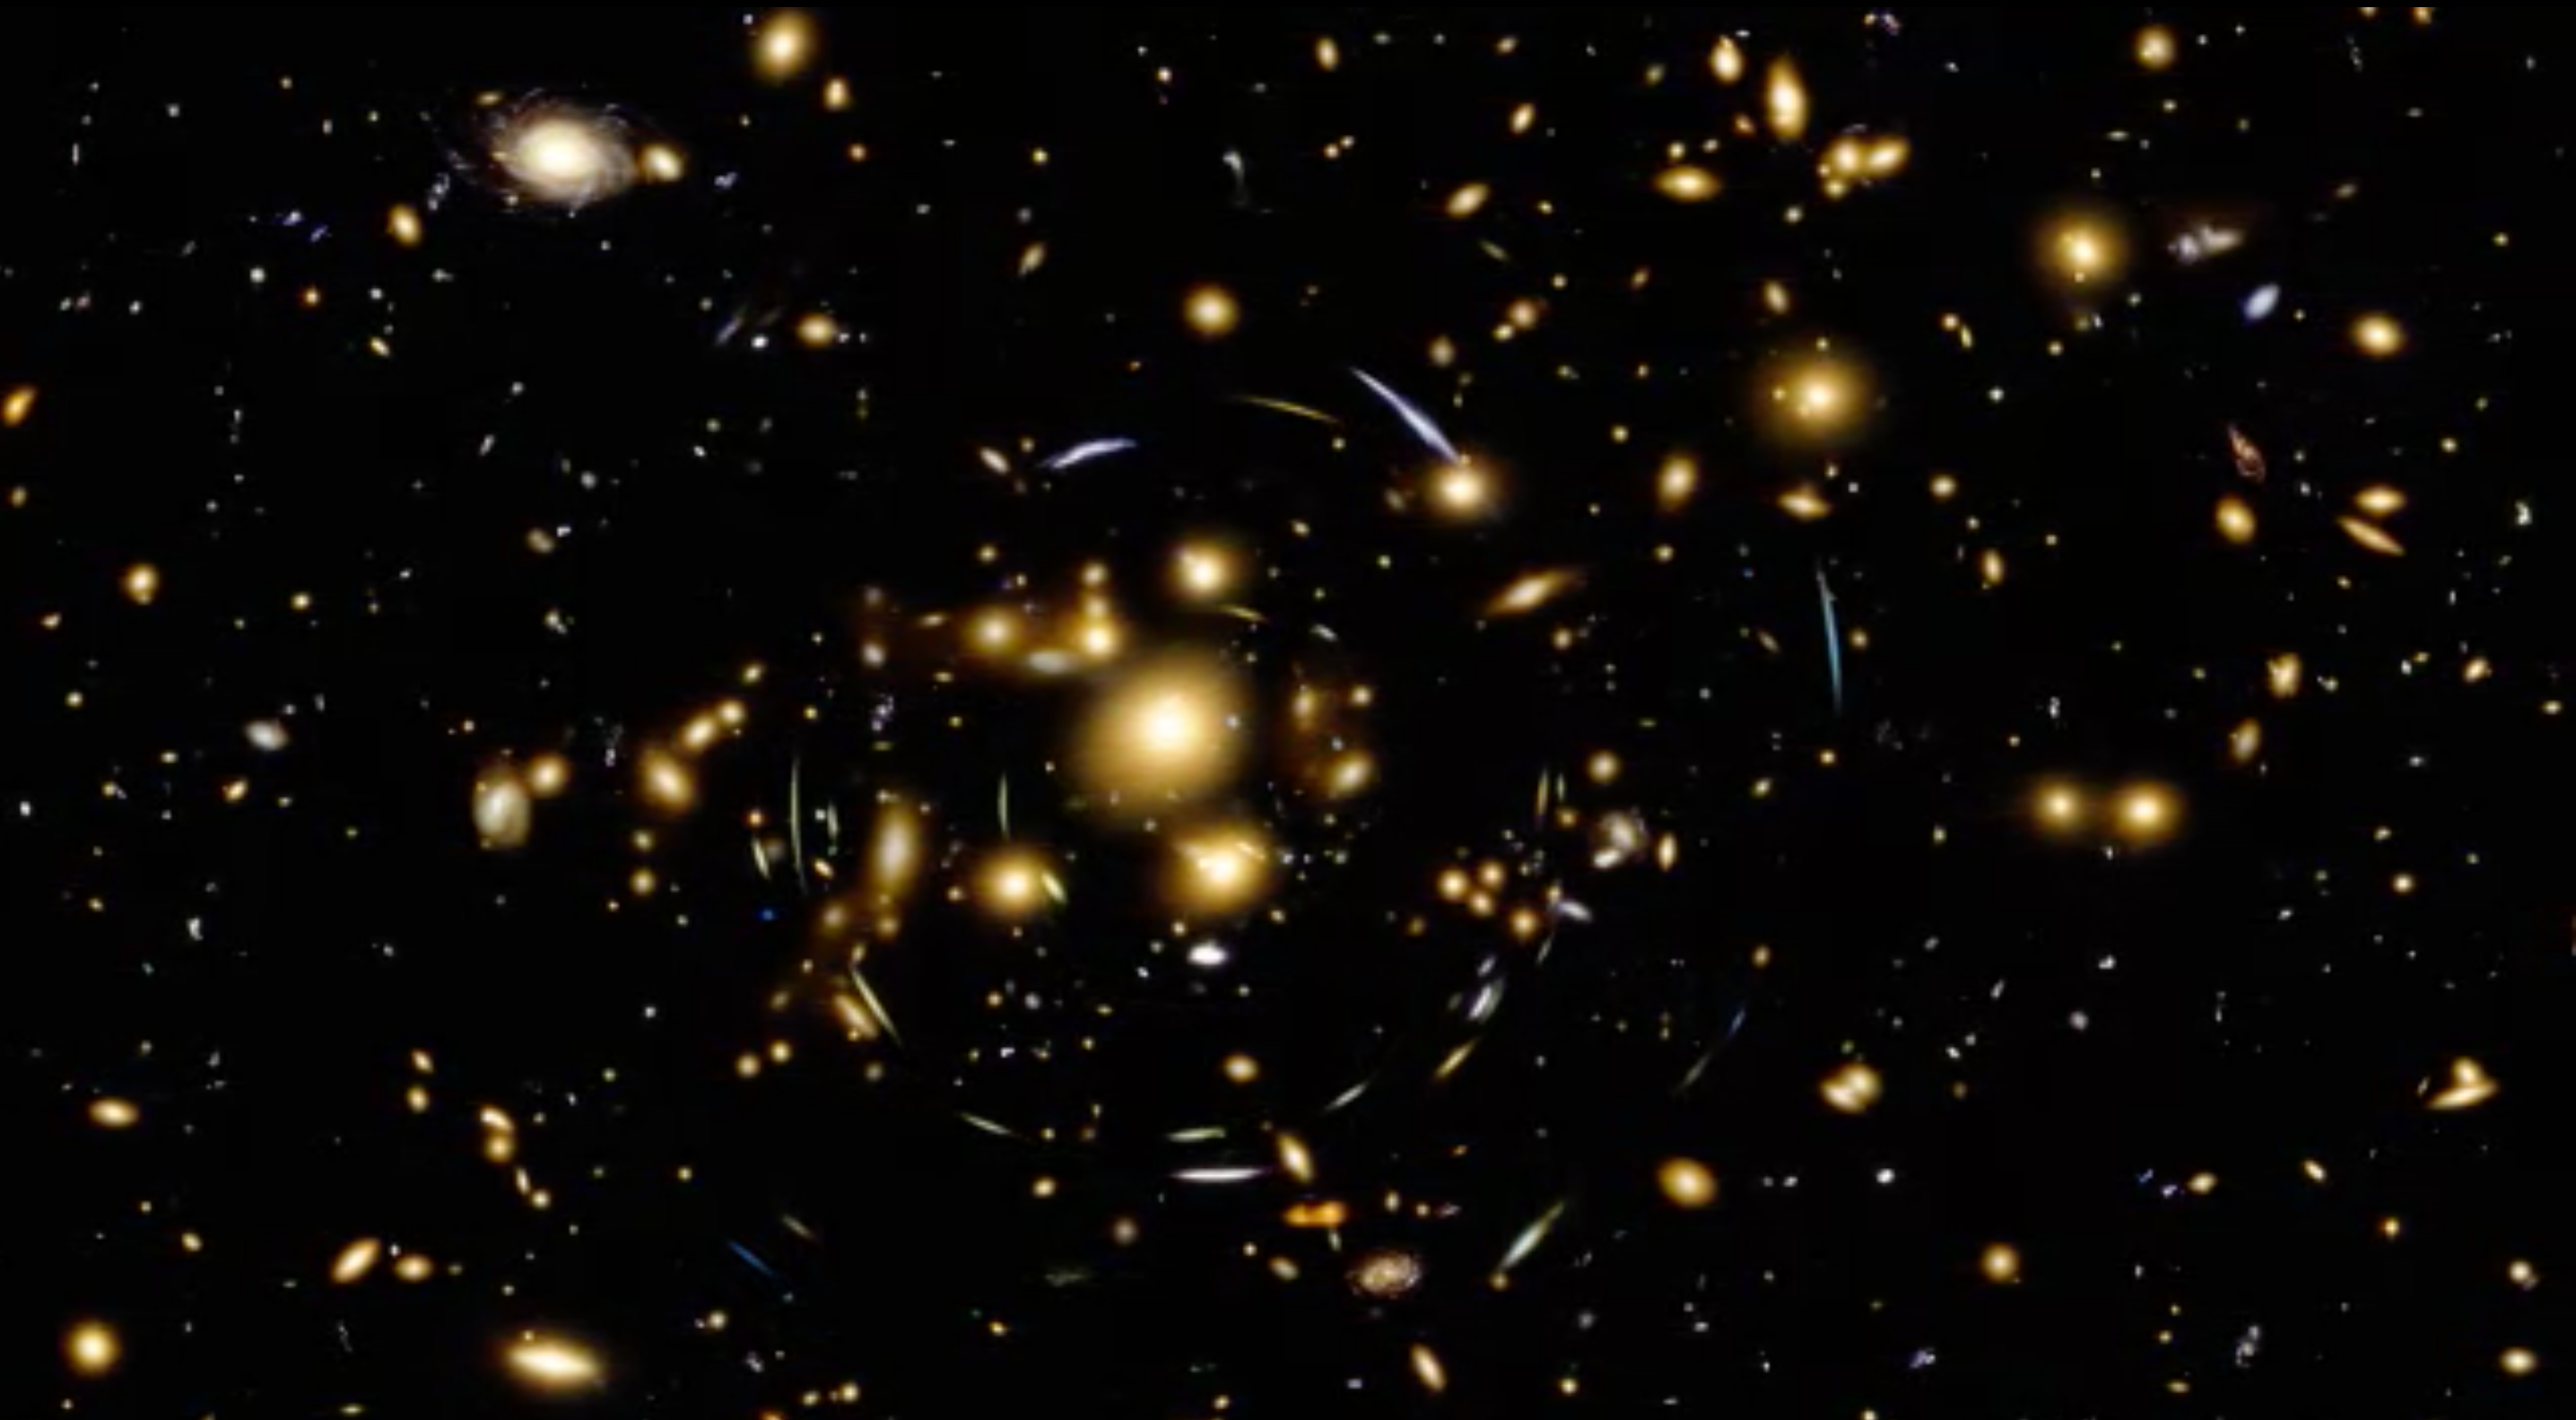

Still from Hubblecast 90: The final frontier

This is a still from Hubblecast 90 which presents the Frontier Fields campaign.

Credit: NASA & ESA